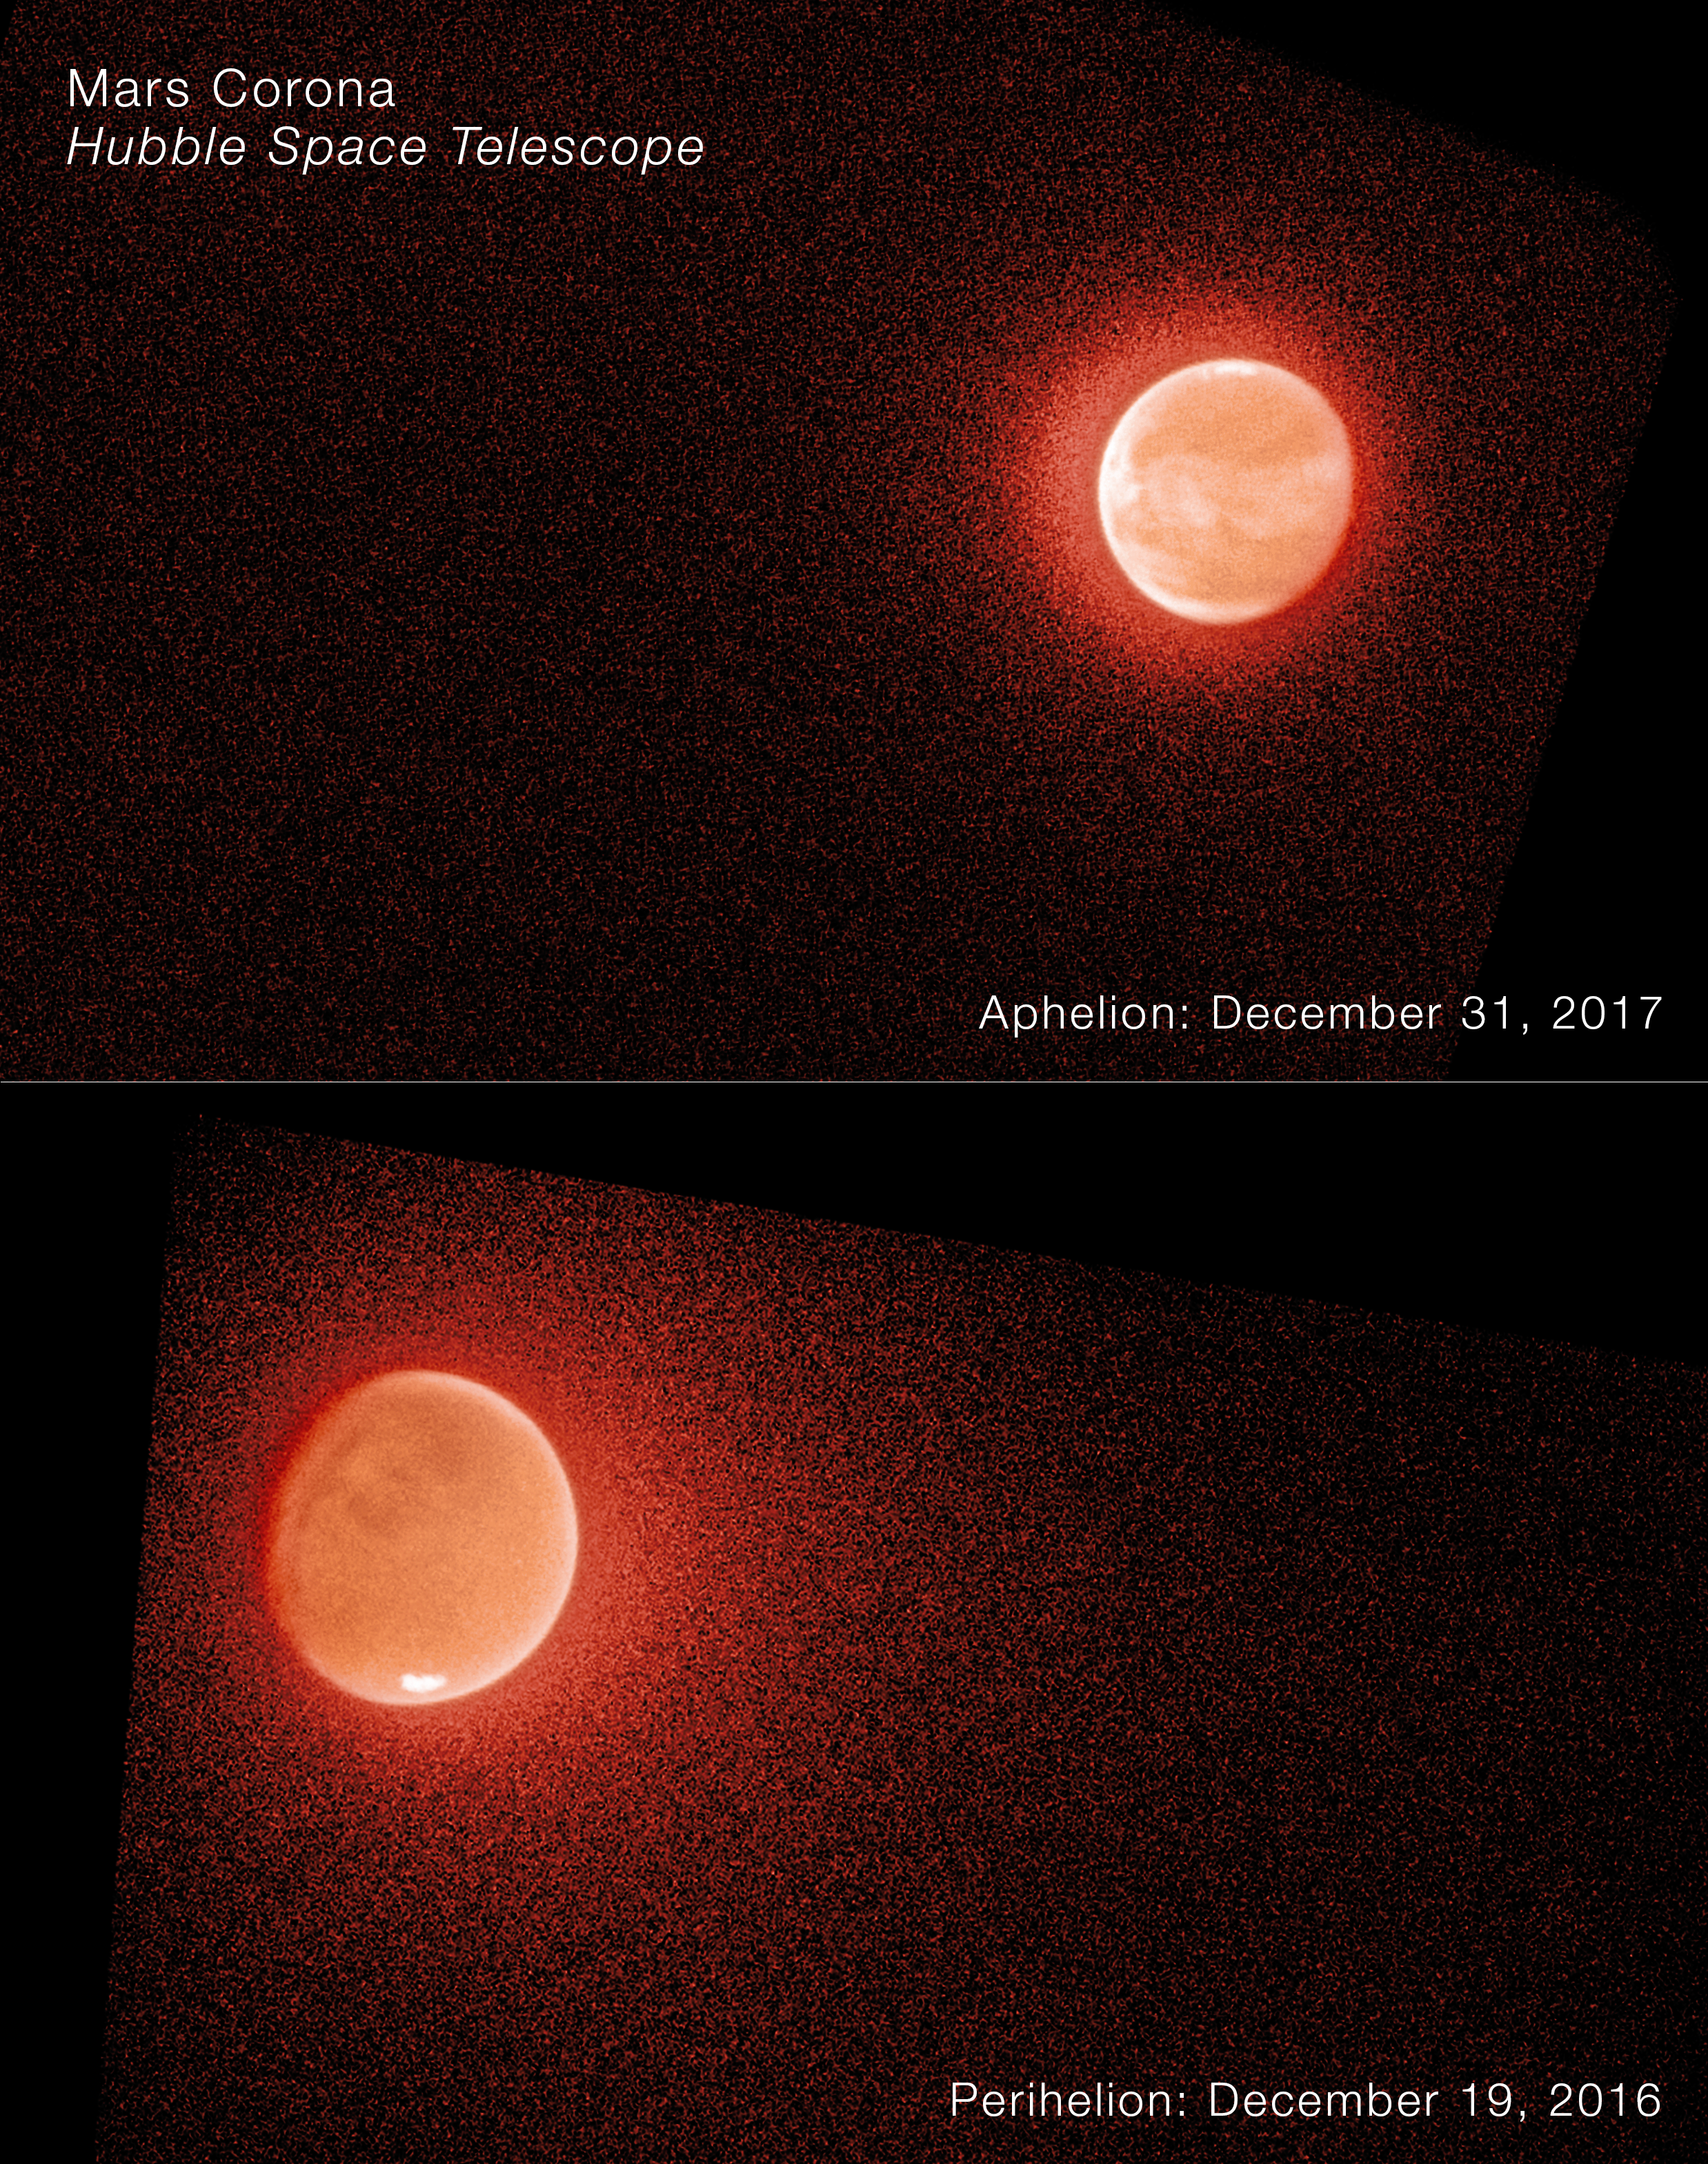

Mars corona

The NASA/ESA Hubble Space Telescope has helped solve the mystery of Mars’ escaping water.

Scientists have discovered that the escape rates of hydrogen and "heavy hydrogen," called deuterium, change rapidly when Mars is close to the Sun. This upended the classical picture that scientists previously had, where these atoms were thought to slowly diffuse upward through the atmosphere to a height where they could escape. Extrapolating the escape rate backwards through time helped the team to understand the history of water on the Red Planet.

These are far-ultraviolet Hubble images of Mars near its farthest point from the Sun, called aphelion, on December 31, 2017 (top), and near its closest approach to the Sun, called perihelion, on December 19, 2016 (bottom). The atmosphere is clearly brighter and more extended when Mars is close to the Sun.

Reflected sunlight from Mars at these wavelengths shows scattering by atmospheric molecules and haze, while the polar ice caps and some surface features are also visible. Hubble and NASA’s MAVEN showed that Martian atmospheric conditions change very quickly. When Mars is close to the Sun, water molecules rise very rapidly through the atmosphere, breaking apart and releasing atoms at high altitudes.

Credit: NASA, ESA, STScI, J. T. Clarke (Boston University)